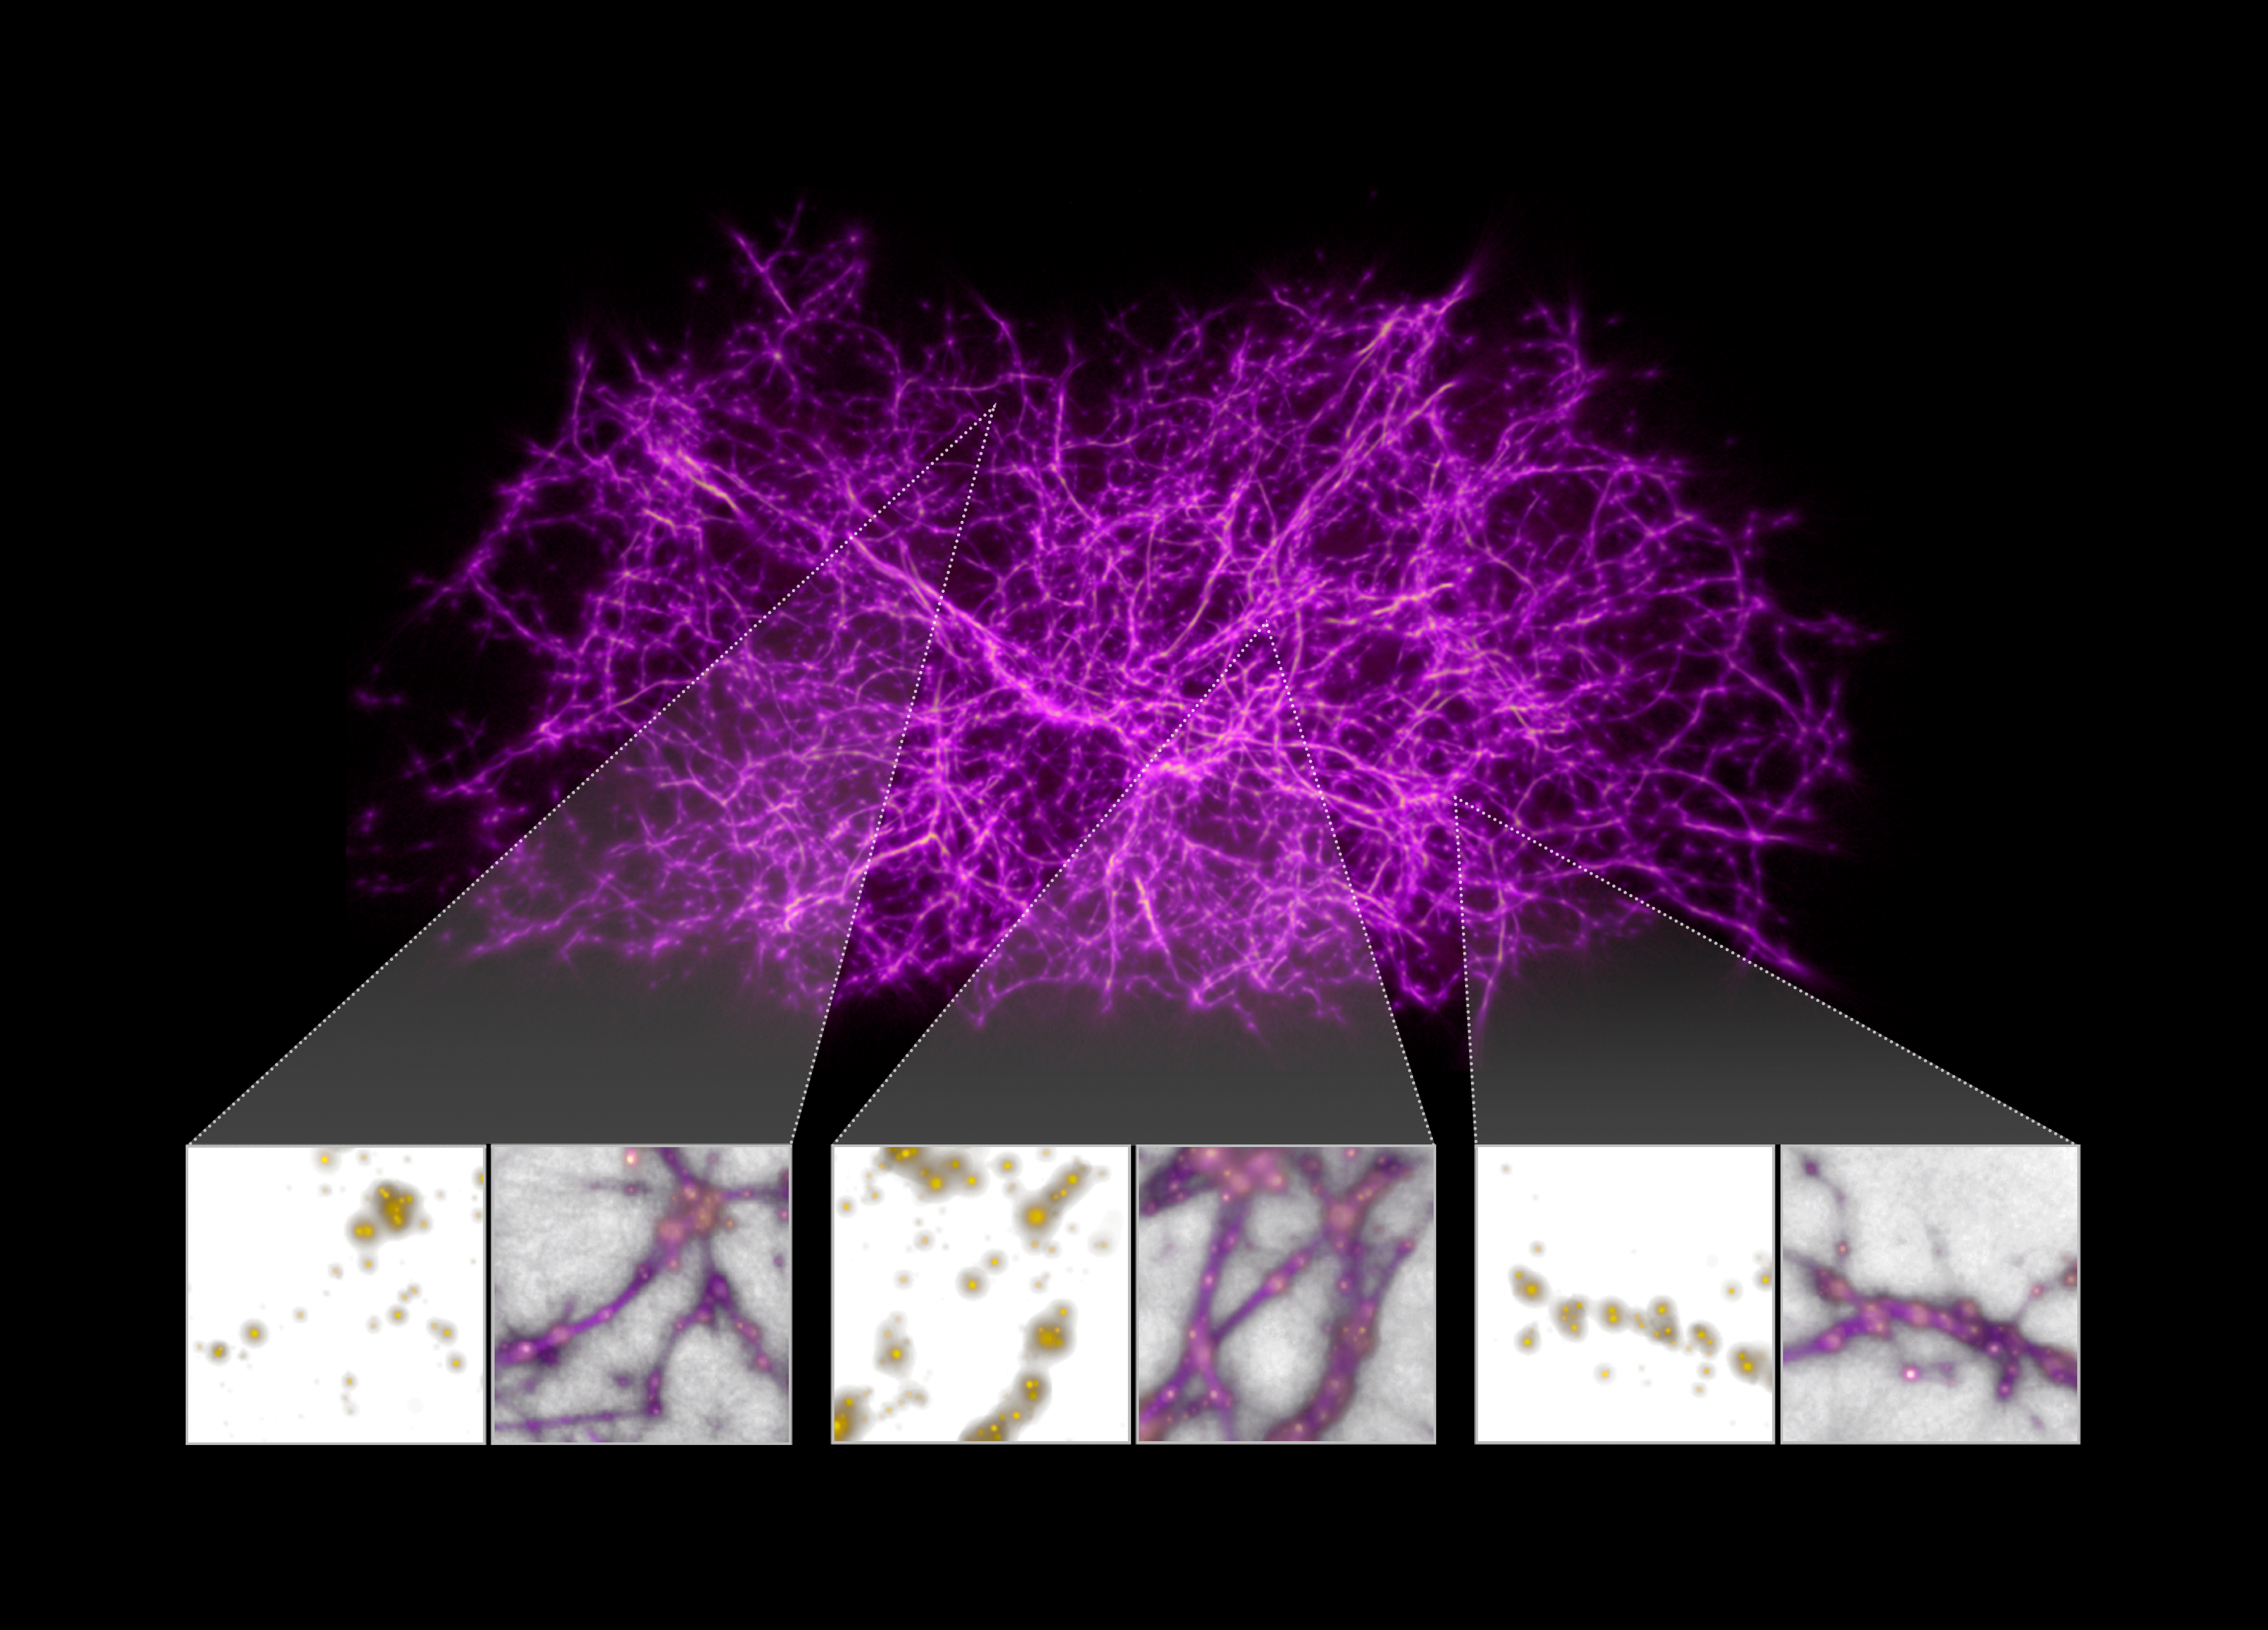

Map of the Cosmic Web Generated from Slime Mould Algorithm

Astronomers have designed a computer algorithm, inspired by slime mould behavior, and tested it against a computer simulation of the growth of dark matter filaments in the Universe. The researchers then applied the slime mould algorithm to data containing the locations of over 37 000 galaxies mapped by the Sloan Digital Sky Survey. The algorithm produced a three-dimensional map of the underlying cosmic web structure.

They then analysed the light from 350 faraway quasars catalogued in the Hubble Spectroscopic Legacy Archive. These distant cosmic flashlights are the brilliant black-hole-powered cores of active galaxies, whose light shines across space and through the foreground cosmic web.

Credit: NASA, ESA, and J. Burchett and O. Elek (UC Santa Cruz)